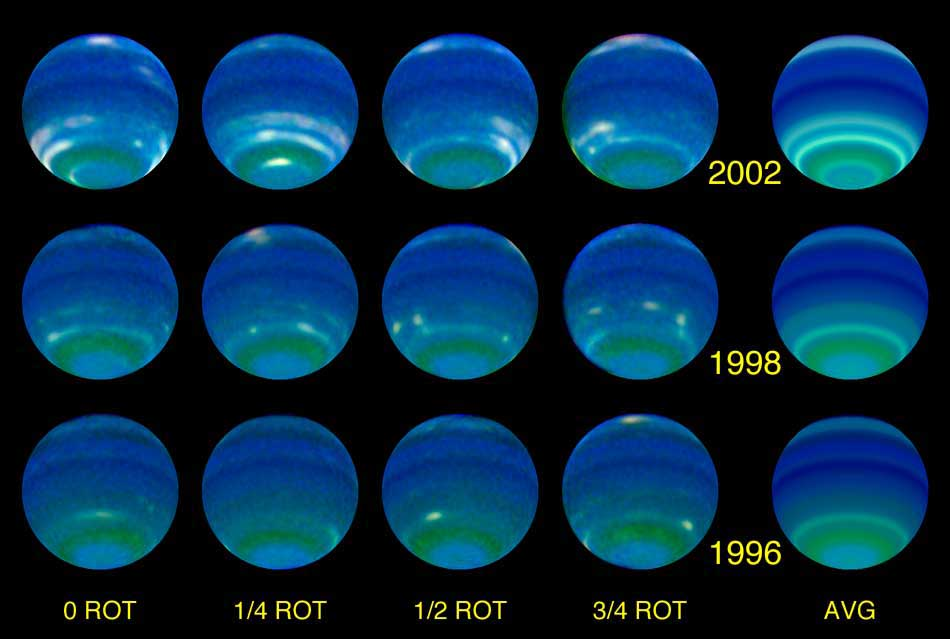

Several Faces of the Planet Neptune at Each Epoch: 1996, 1998 and 2002

These individual colour composite images used Hubble blue, green and red filters. Each image component was also processed to reduce limb darkening and enhance contrast, and is a blend of several images taken at different longitudes. The images for each year were processed the same as for other years so that relative temporal changes are meaningful. The first four columns display views at 0, 1/4, 1/2, and 3/4 rotations, to show the distributions of features. The last column displays the longitudinal average, showing that latitude bands near30 S, 45 S, and 67 S, have increased dramatically in brightness.

Credit: NASA/ESA, L. Sromovsky, and P. Fry (University of Wisconsin-Madison)